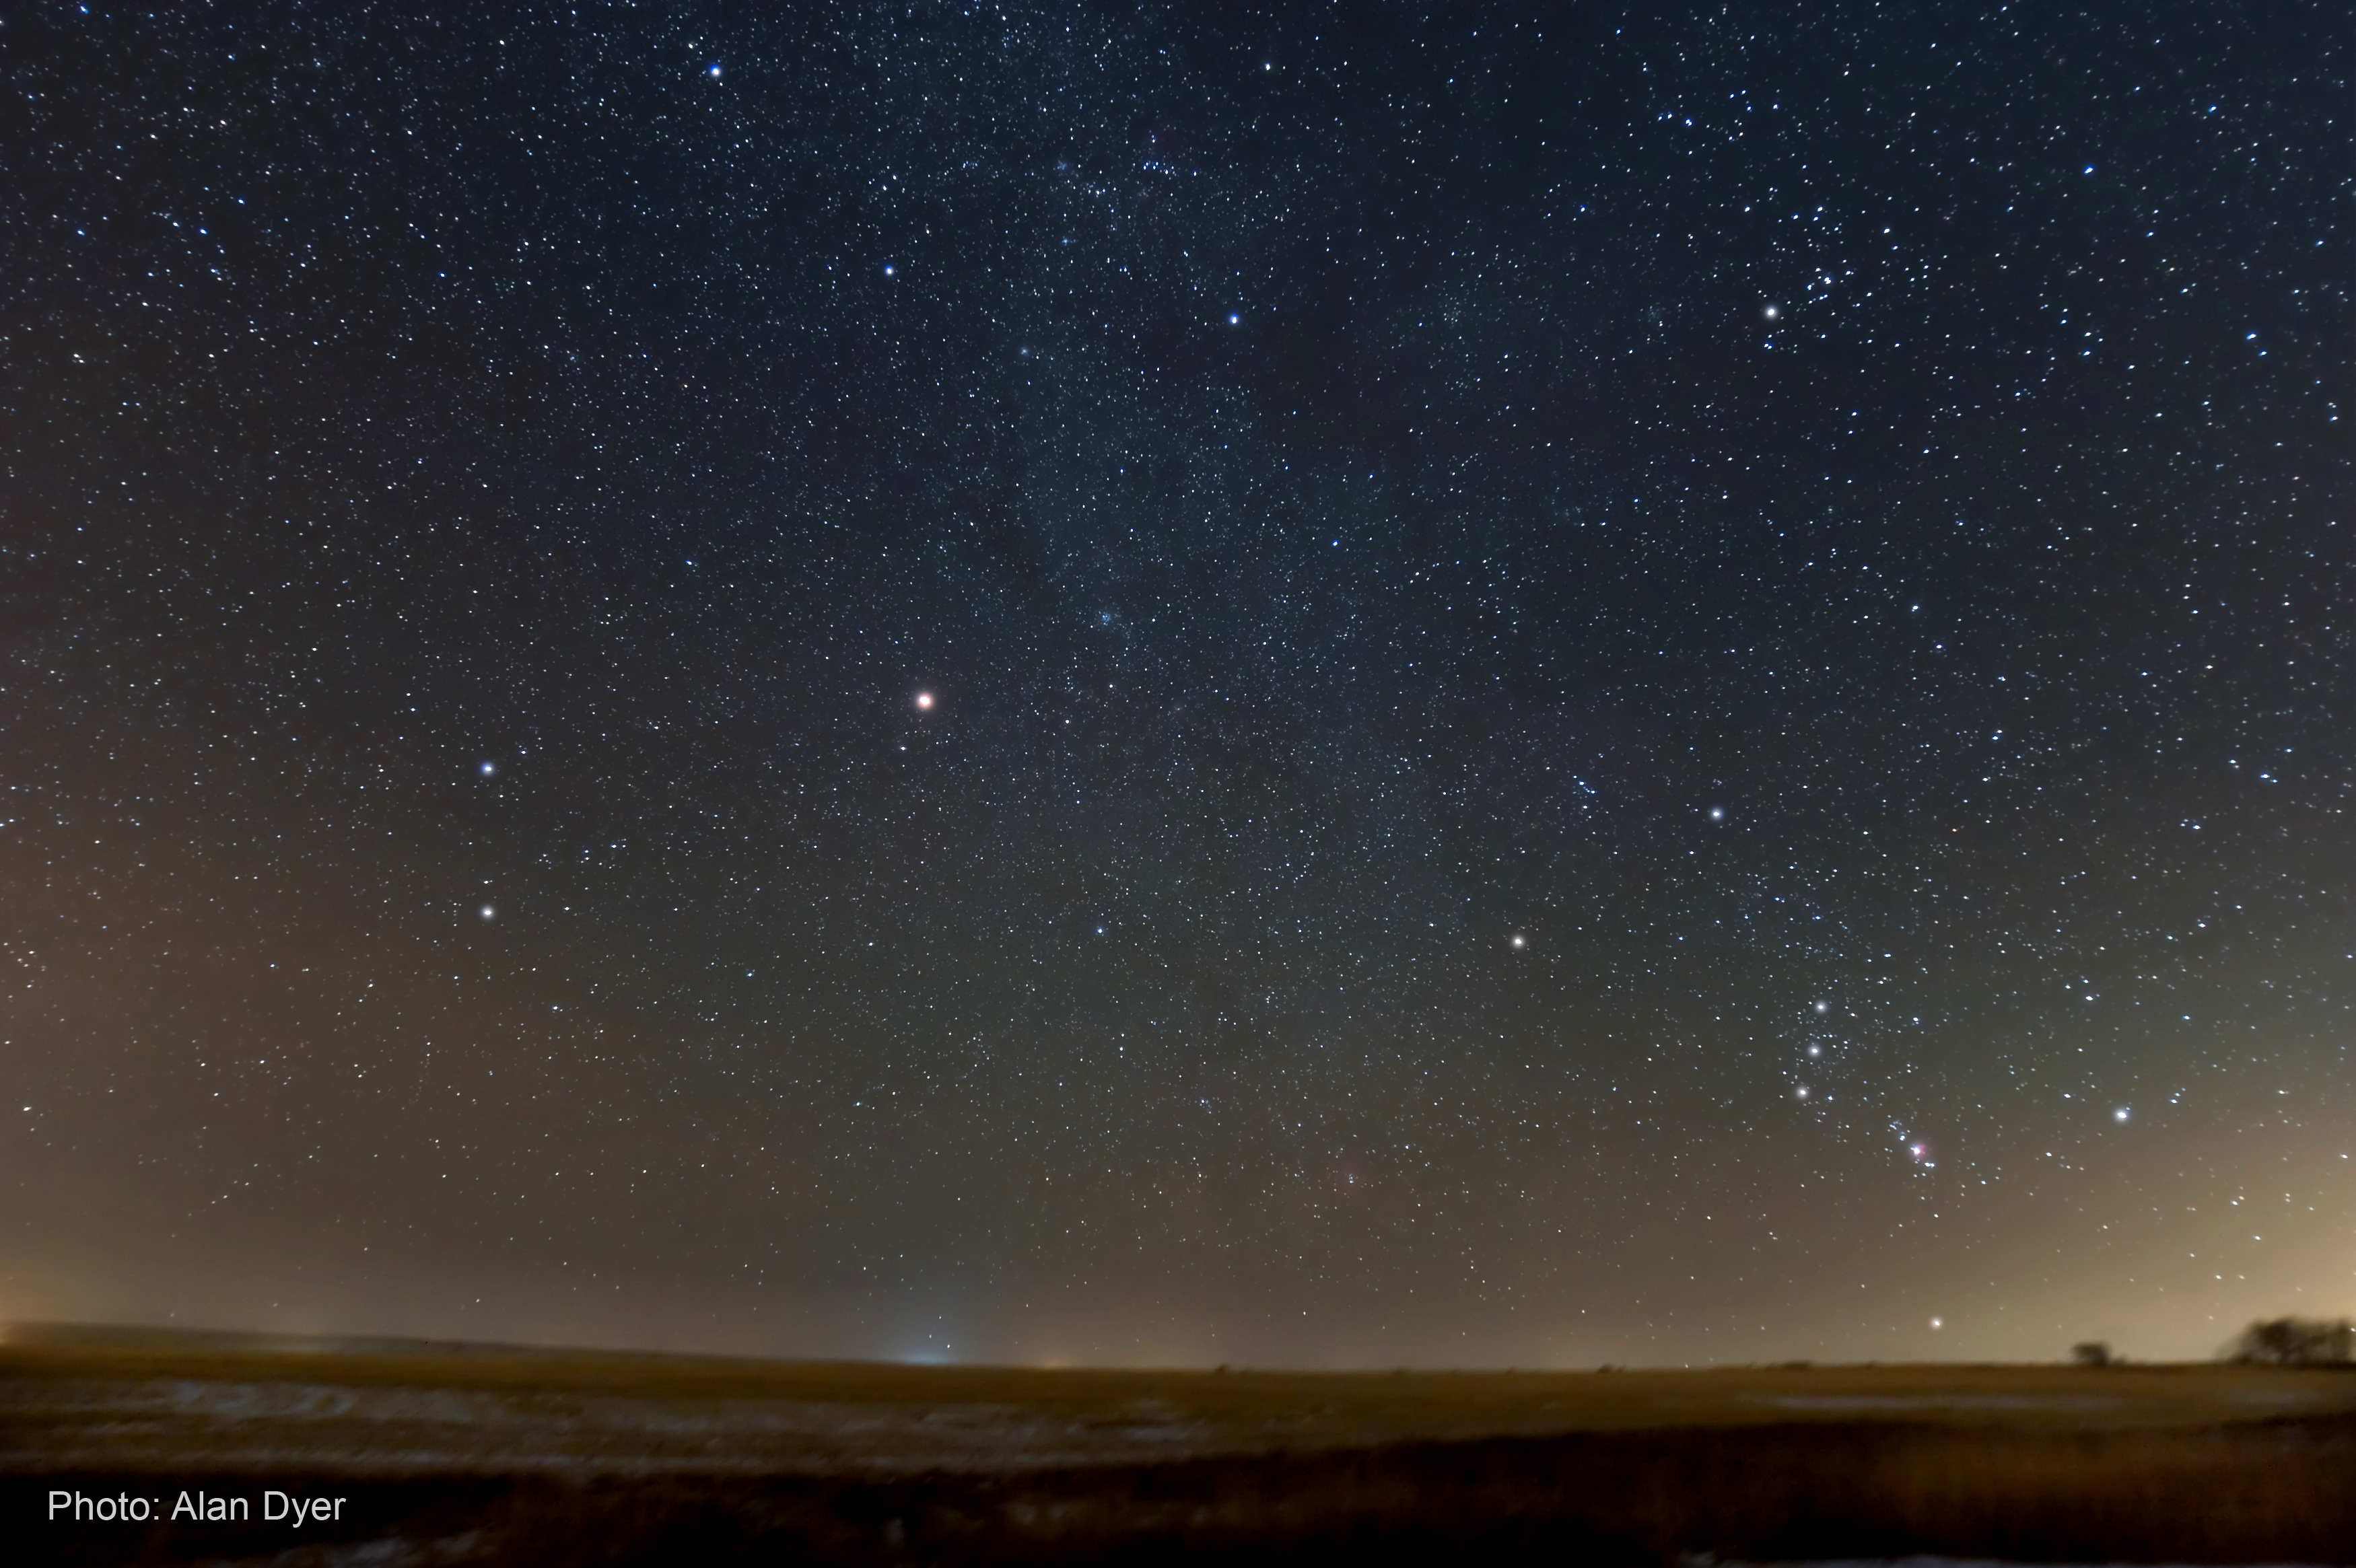

Ground-based Image of Mars, December 2007

Mars as seen in the night sky on December 8, 2007. Image was taken in southern Alberta, Canada (latitude of 51› N) by astrophotographer Alan Dyer. Mars, located in the constellation Gemini, is rising along the eastern horizon. Above it, portions of the winter Milky Way are visible, along with the constellation Orion at the far right. Mars appears ruddy red, while the Orion Nebula, located under the belt stars and along the sword of Orion appears pink. This image was taken with a Canon 16-35mm lens at f/2.8 and 16mm setting. ISO 800 for 90 second tracked exposure with Canon 20Da camera.

Credit: NASA, ESA, and A. Dyer